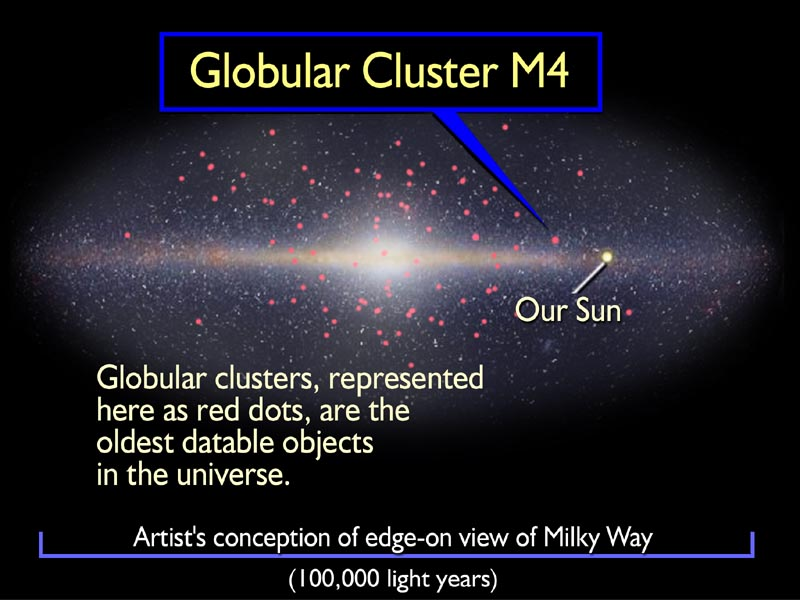

Globular cluster M4 in the Milky Way

This illustration shows the location of the globular cluster M4 in our Milky Way Galaxy, which is depicted 'edge-on' or from the side. Globular clusters like M4 are the first pioneer settlers of the Milky Way. Many coalesced to build the hub of our galaxy and formed billions of years before the appearance of the Milky Way's magnificent pinwheel disk. Today, 150 globular clusters survive in the galactic halo.

Credit: NASA/ESA and A. Feild